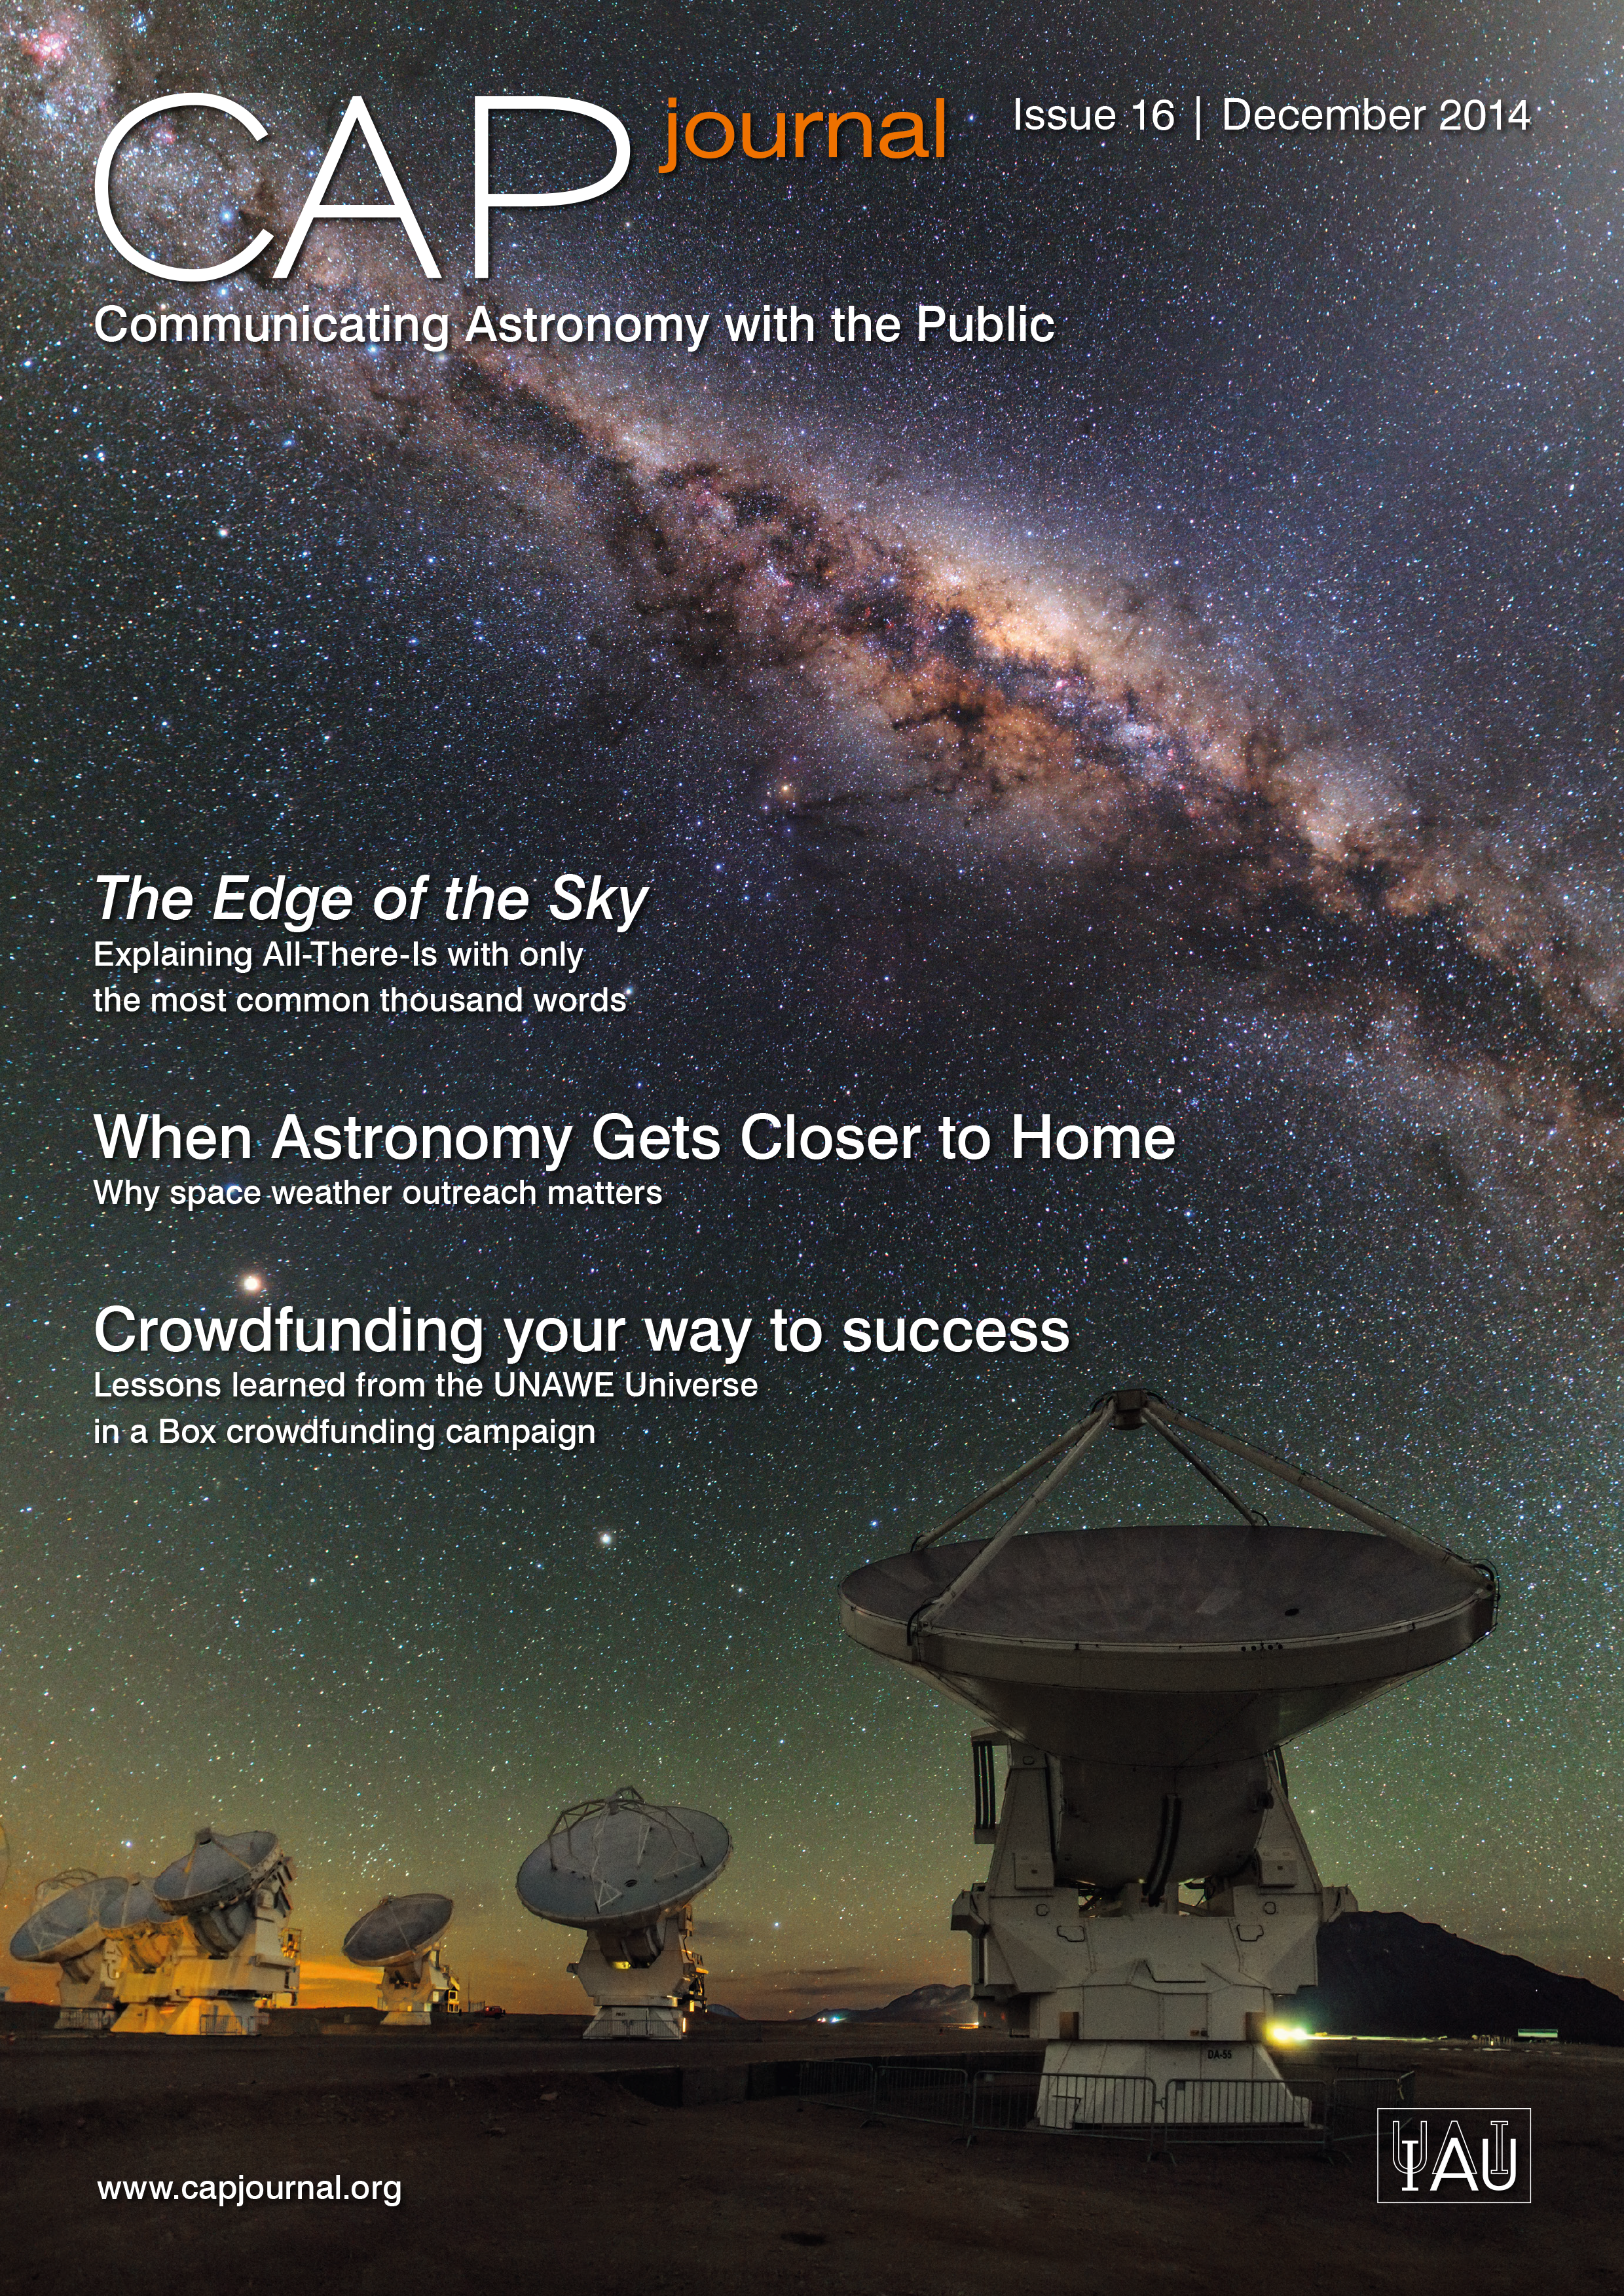

Cover of CAPjournal issue 16

The CAPjournal is a free peer-reviewed journal for astronomy communicators, online and in print. To subscribe to the print or online version please go here. This issue in PDF format is available on: http://www.capjournal.org/issues/16/.

Credit: IAU/ESA/Hubble